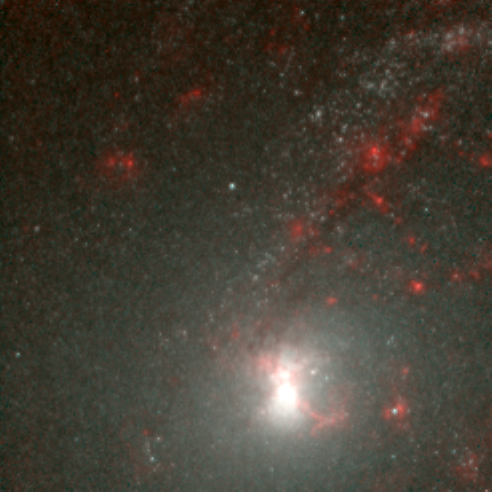

Hubble's Infrared Galaxy Gallery. A View of NGC 6946

Astronomers have used the NASA/ESA Hubble Space Telescope to produce an infrared 'photo essay' of spiral galaxies. By penetrating the dust clouds swirling around the centers of these galaxies, the telescope’s infrared vision is offering fresh views of star birth.

Credit: Torsten Boeker, Space Telescope Science Institute, and NASA/ESA